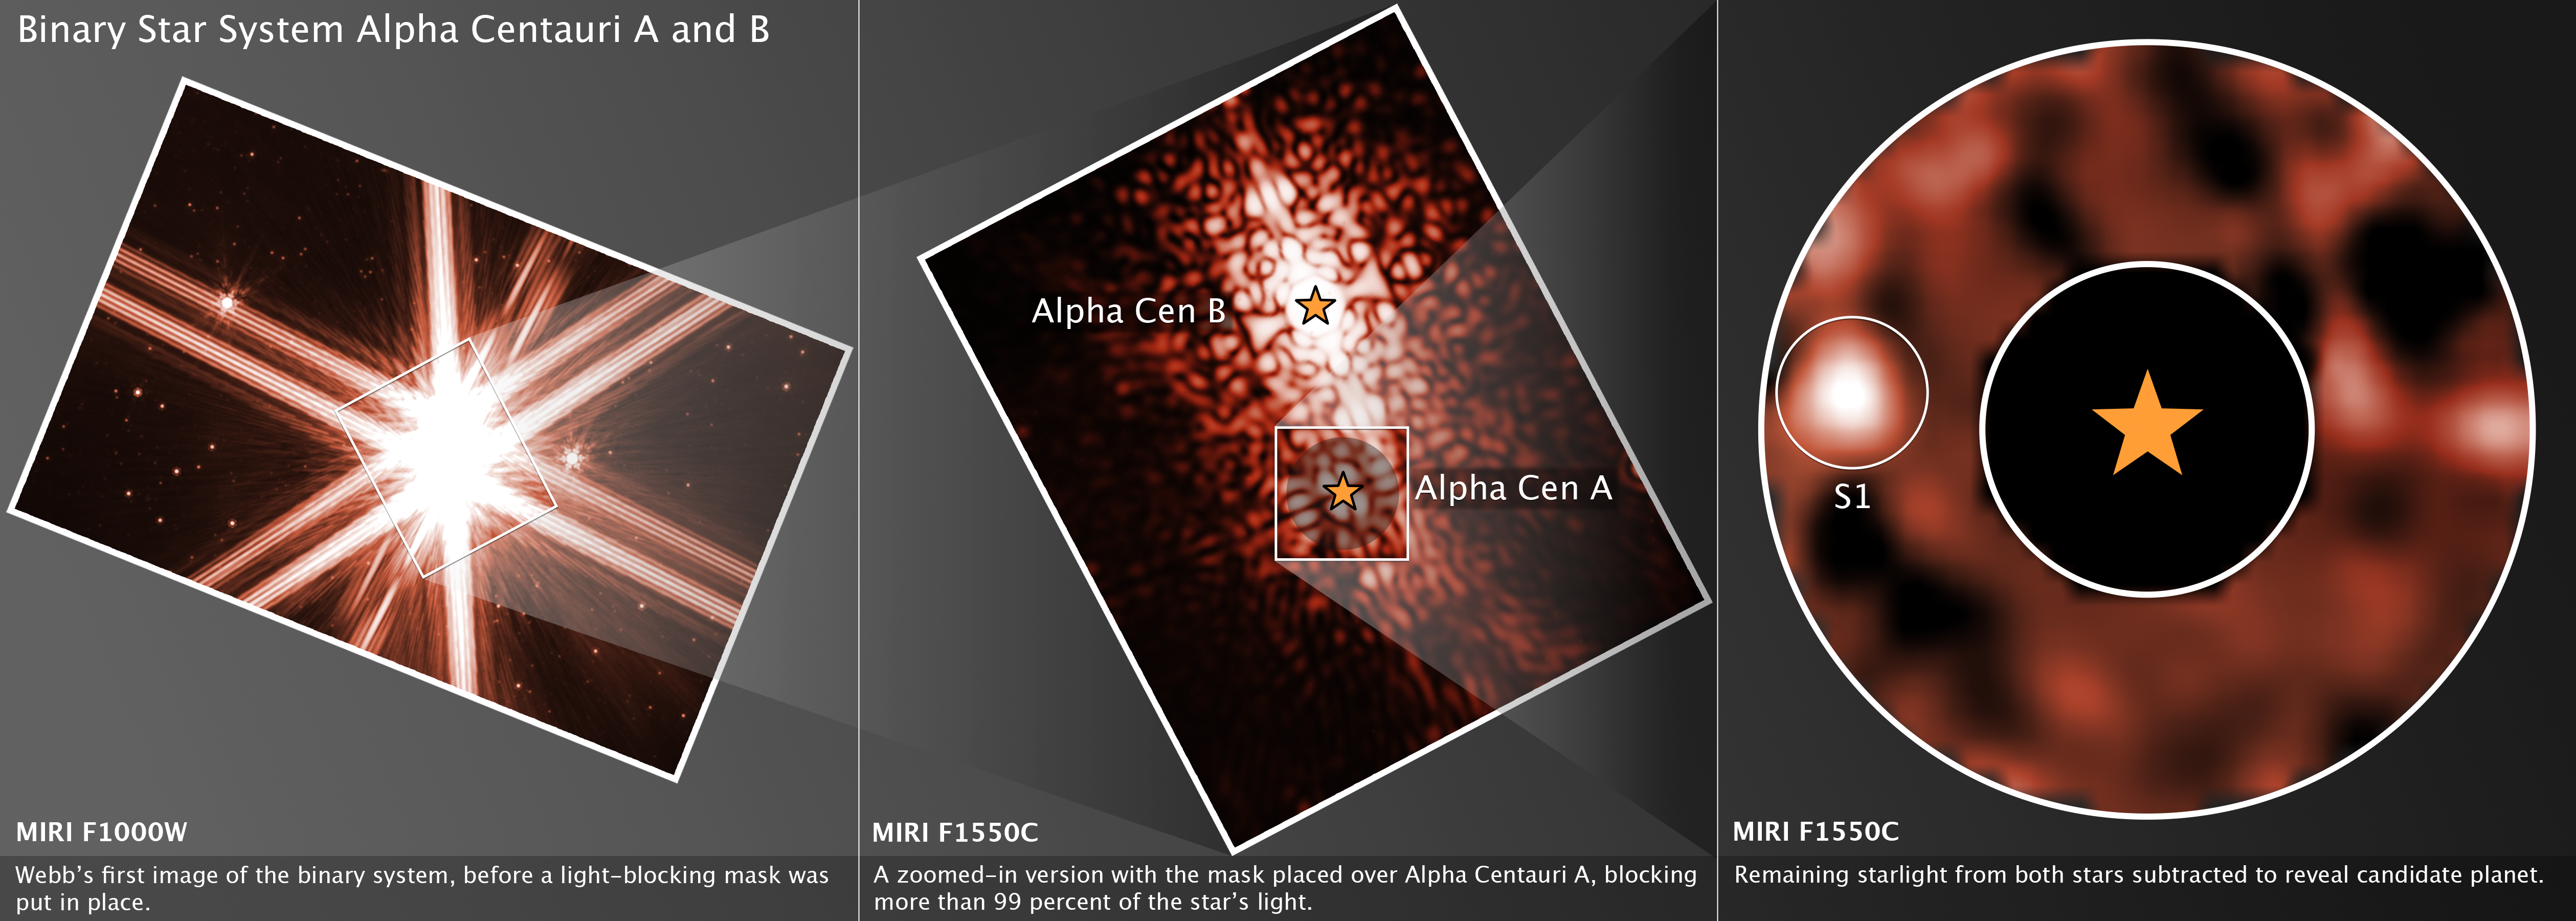

Alpha Centauri 3 Panel (Webb)

This 3-panel image captures the NASA/ESA/CSA James Webb Space Telescope’s observational search for a planet around the nearest Sun-like star, Alpha Centauri A. The initial image shows the bright glare of Alpha Centauri A and Alpha Centauri B, then the middle panel shows the system with a coronagraphic mask placed over Alpha Centauri A to block its bright glare. However, the way the light bends around the edges of the coronagraph creates ripples of light in the surrounding space. The telescope’s optics (its mirrors and support structures) cause some light to interfere with itself, producing circular and spoke-like patterns. These complex light patterns, along with light from the nearby Alpha Centauri B, make it incredibly difficult to spot faint planets. In the panel at the right, astronomers have subtracted the known patterns (using reference images and algorithms) to clean up the image and reveal faint sources like the candidate planet.

Credit: NASA, ESA, CSA, STScI, A. Sanghi (Caltech), C. Beichman (JPL), D. Mawet (Caltech), J. DePasquale (STScI)